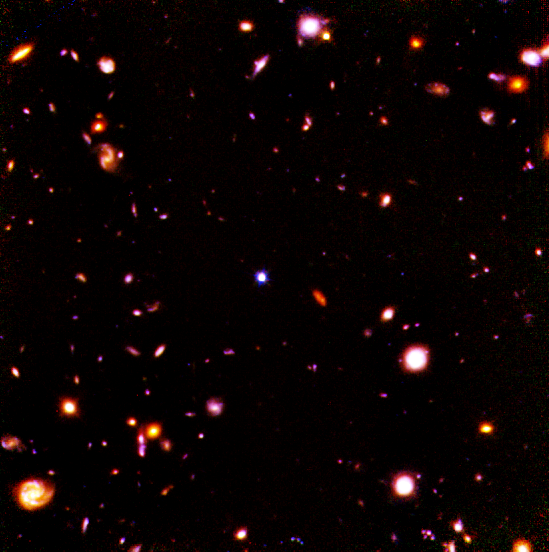

Hubble Deep Field in Infrared

A NASA/ESA Hubble Space Telescope view of the faintest galaxies ever seen in the universe, taken in infrared light with the Near Infrared Camera and Multi-Object Spectrometer(NICMOS).

The picture contains over 300 galaxies having spiral, elliptical and irregular shapes. Though most of these galaxies were first seen in 1995 when Hubble was used to take a visible-light deep exposure of the same field, NICMOS uncovers many new objects. Most of these objects are too small and faint to be apparent in the full field NICMOS view.

Credit: Rodger I. Thompson (University of Arizona), and NASA/ESA